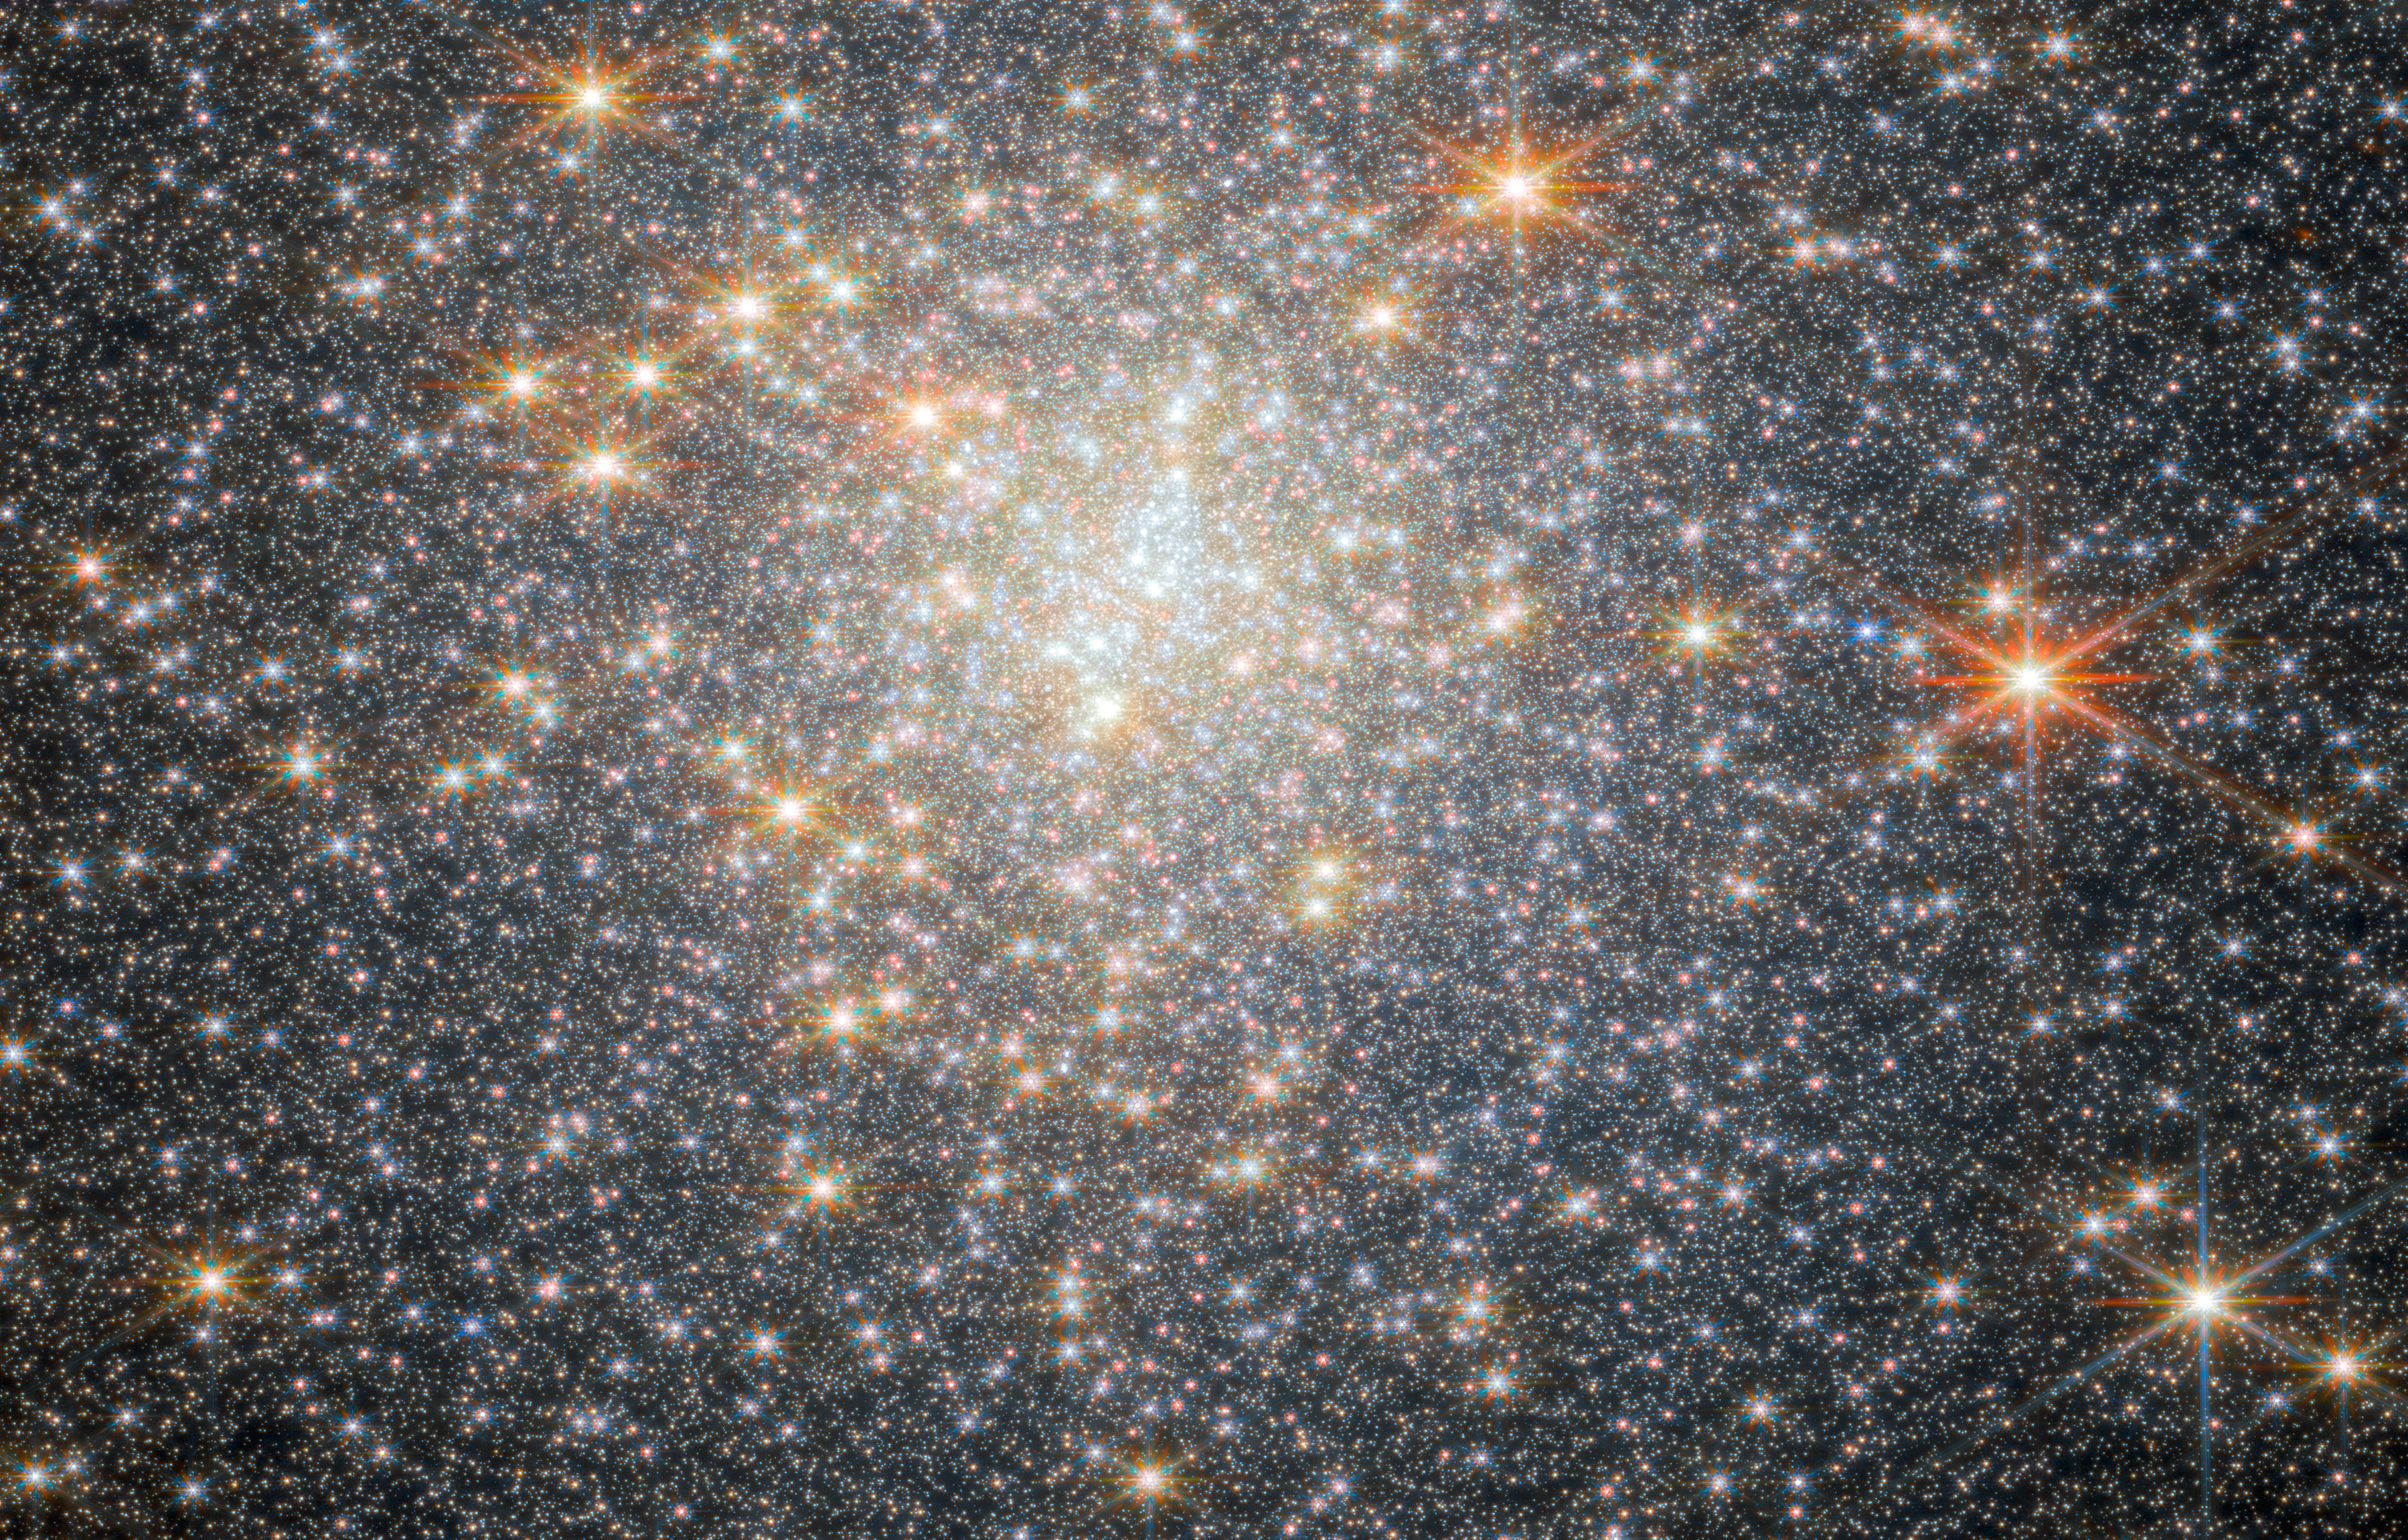

Star-studded cluster

This new image from the NASA/ESA/CSA James Webb Space Telescope features NGC 6440, a globular cluster that resides roughly 28 000 light-years from Earth in the constellation Sagittarius. The object was first discovered by William Herschel in May of 1786.

Globular clusters like NGC 6440 are roughly spherical, tightly packed, collections of old stars bound together by gravity. They can be found throughout galaxies, but often live on the outskirts. They hold hundreds of thousands to millions of stars that are on average about one light-year apart, but they can be as close together as the size of our Solar System. NGC 6440 is known to be a high-mass and metal-rich cluster that formed and is orbiting within the Galactic bulge, which is a dense, near-spherical region of old stars in the inner part of the Milky Way.

This image was obtained with 2023 data from Webb’s Near-InfraRed Camera (NIRCam) as part of an observation programme to explore the stars in the cluster and to investigate details of the cluster’s pulsars. A pulsar is a highly magnetised, rotating neutron star that emits a beam of electromagnetic radiation from their magnetic poles. To us, that beam appears as a short burst or pulse as the star rotates. Pulsars spin extremely fast. Astronomers have clocked the fastest pulsars at more than 716 rotations per second, but a pulsar could theoretically rotate as fast as 1500 rotations per second before slowly losing energy or breaking apart.

The new data obtained by the science team indicate the first evidence from Webb observations of abundance variations of helium and oxygen in stars in a globular cluster. These results open the window for future, in-depth investigations of other clusters in the Galactic bulge, which were previously infeasible with other telescope facilities given the significant crowding of stars in the cluster and the strong reddening caused by interstellar dust between the cluster and Earth.

Credit: ESA/Webb, NASA & CSA, P. Freire Acknowledgement: M. Cadelano and C. Pallanca